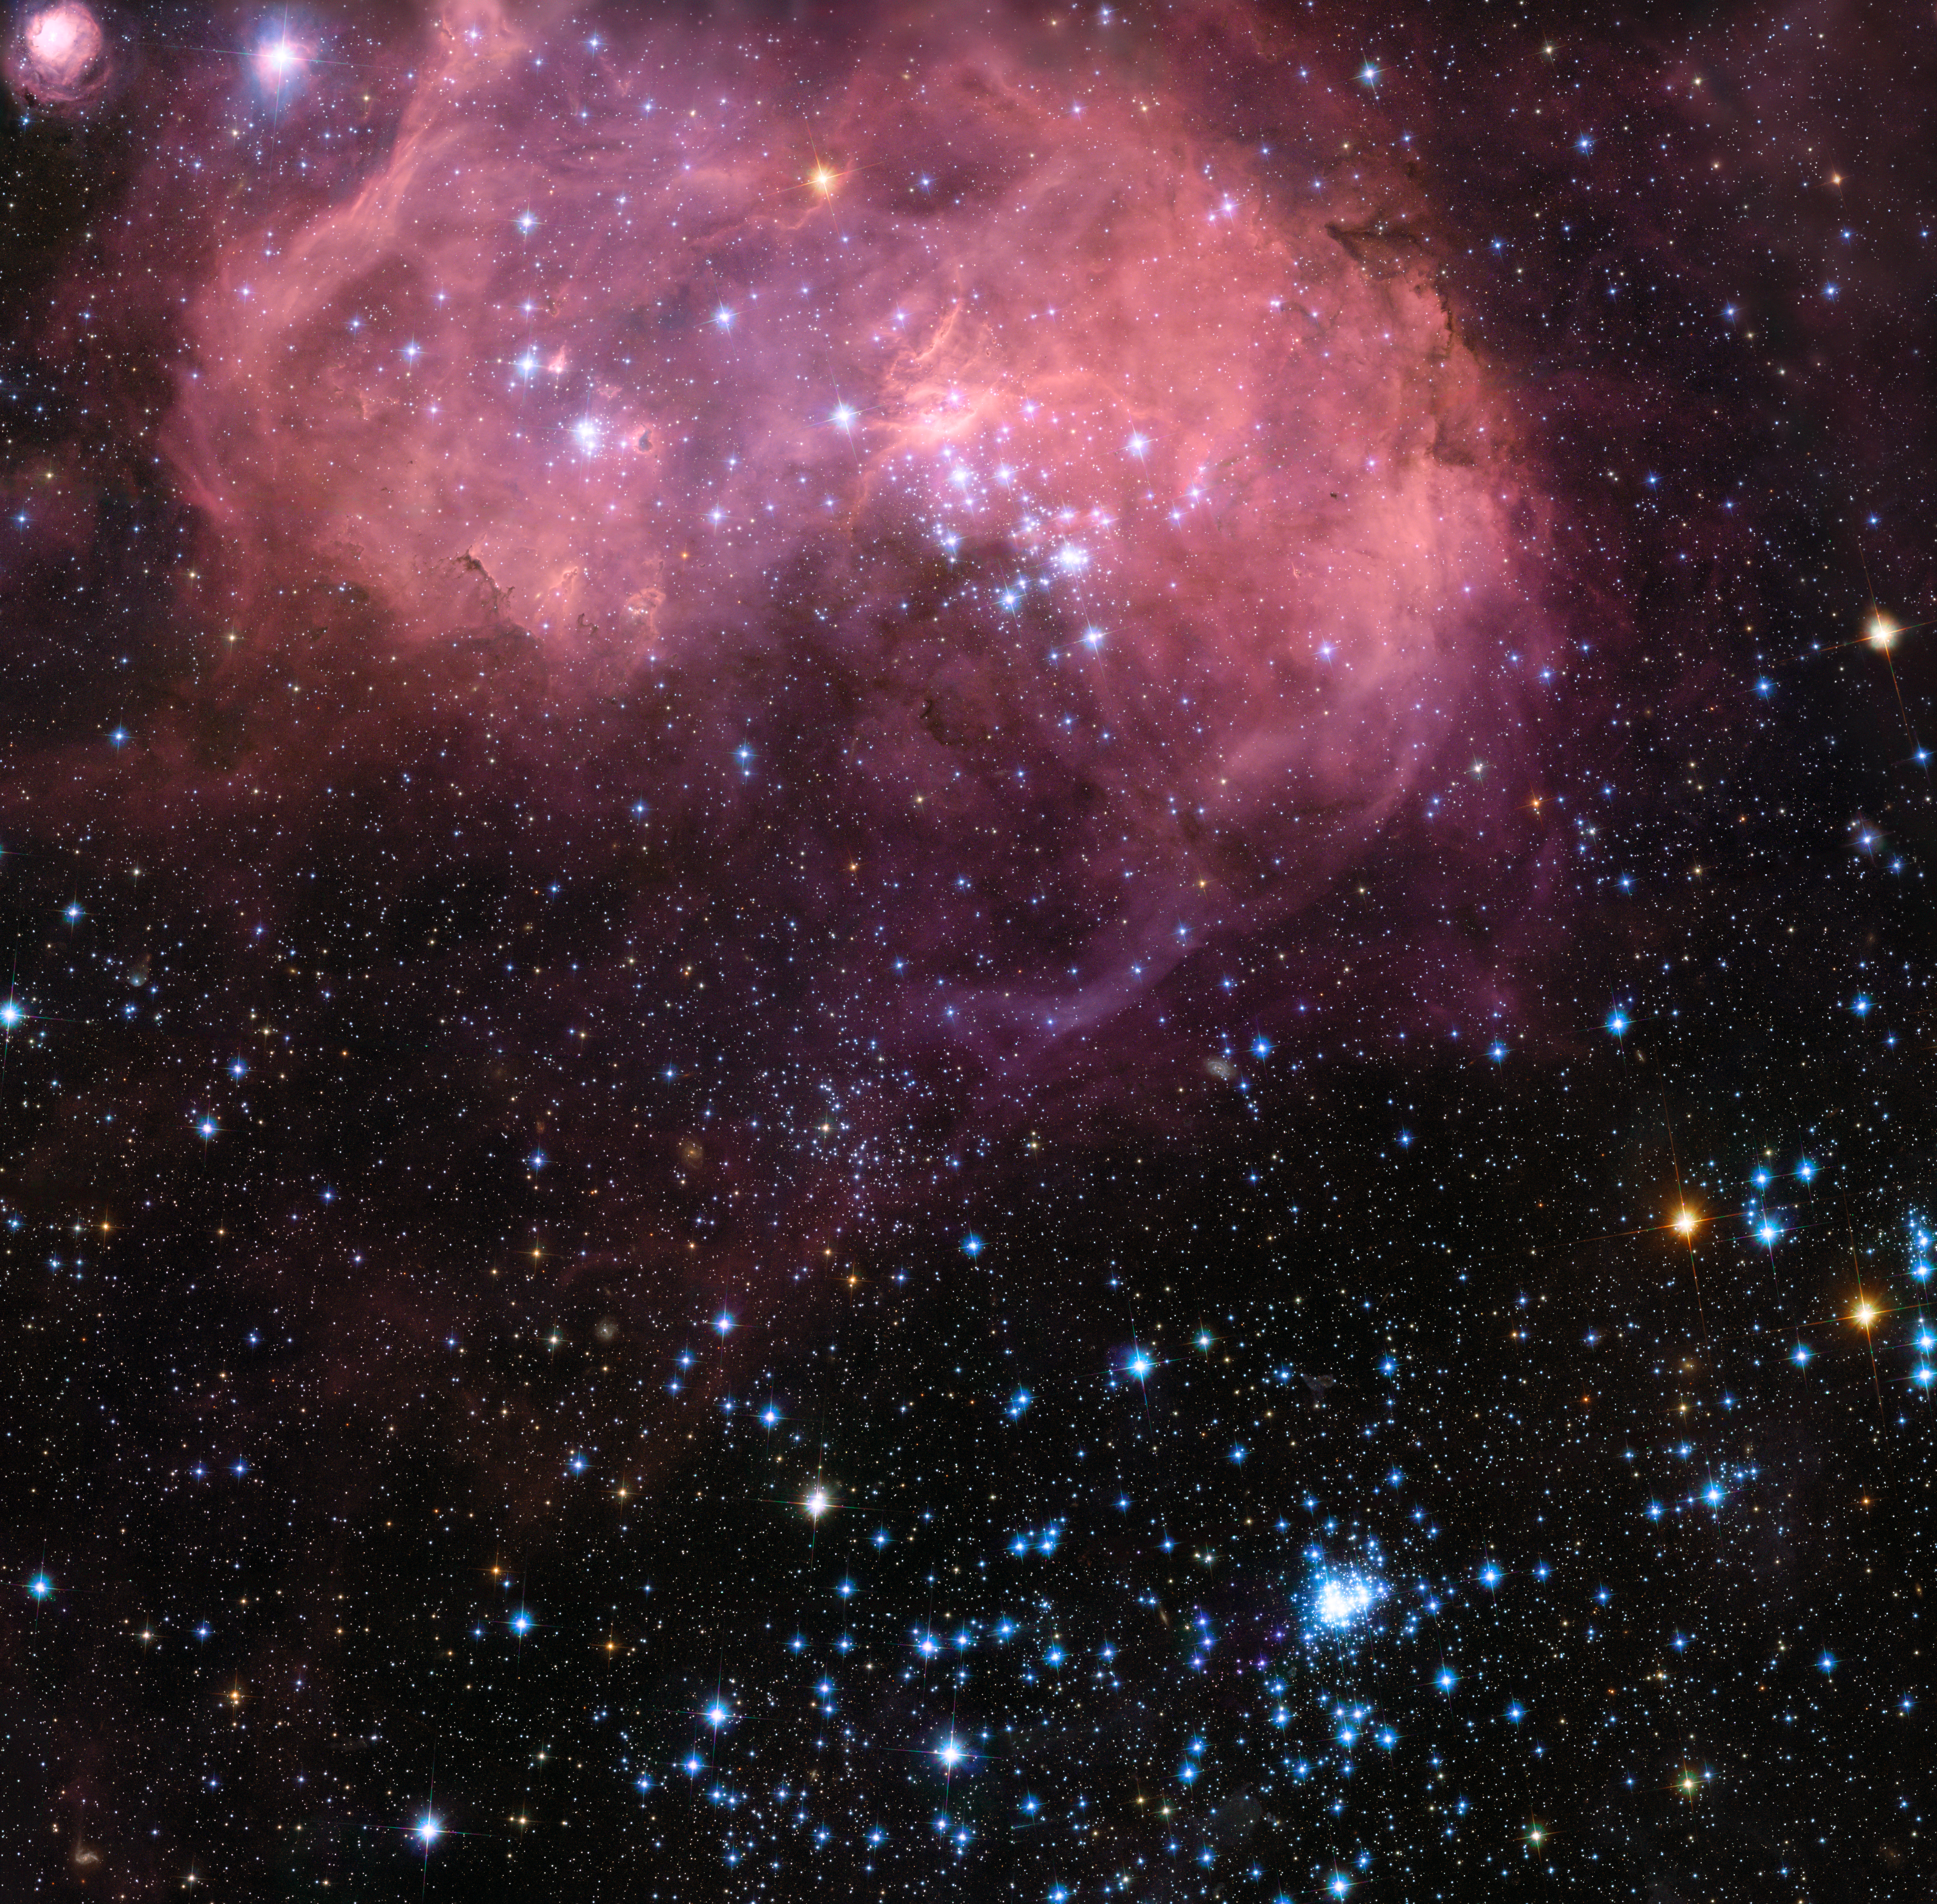

Hubble view of the huge star formation region N11 in the Large Magellanic Cloud

This broad vista of young stars and gas clouds in our neighbouring galaxy, the Large Magellanic Cloud, was captured by the NASA/ESA Hubble Space Telescope’s Advanced Camera for Surveys (ACS). This region is named LHA 120-N 11, informally known as N11, and is one of the most active star formation regions in the nearby Universe. This picture is a mosaic of ACS data from five different positions and covers a region about six arcminutes across.

Credit: NASA, ESA and Jesús Maíz Apellániz (Instituto de Astrofísica de Andalucía, Spain)